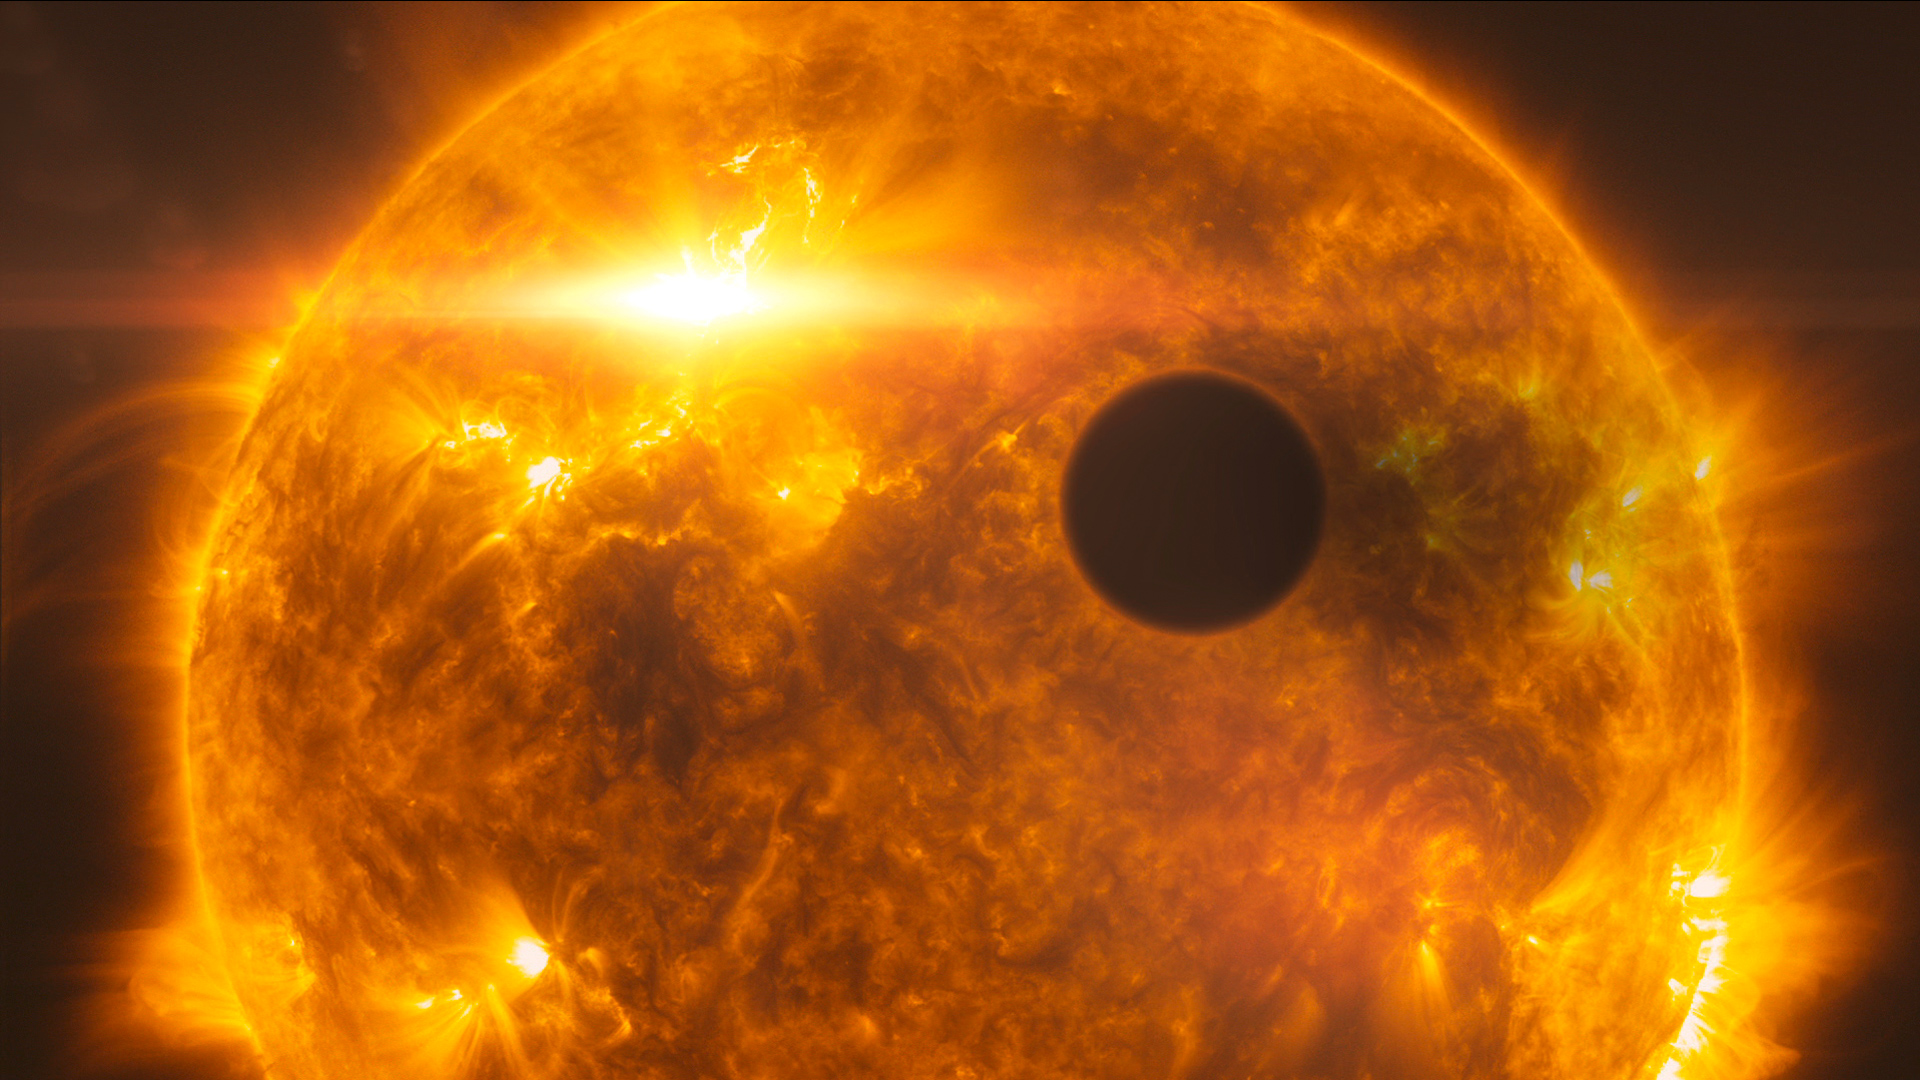

Screenshot of Hublecast 56

Watch the video here

Credit: NASA & ESA